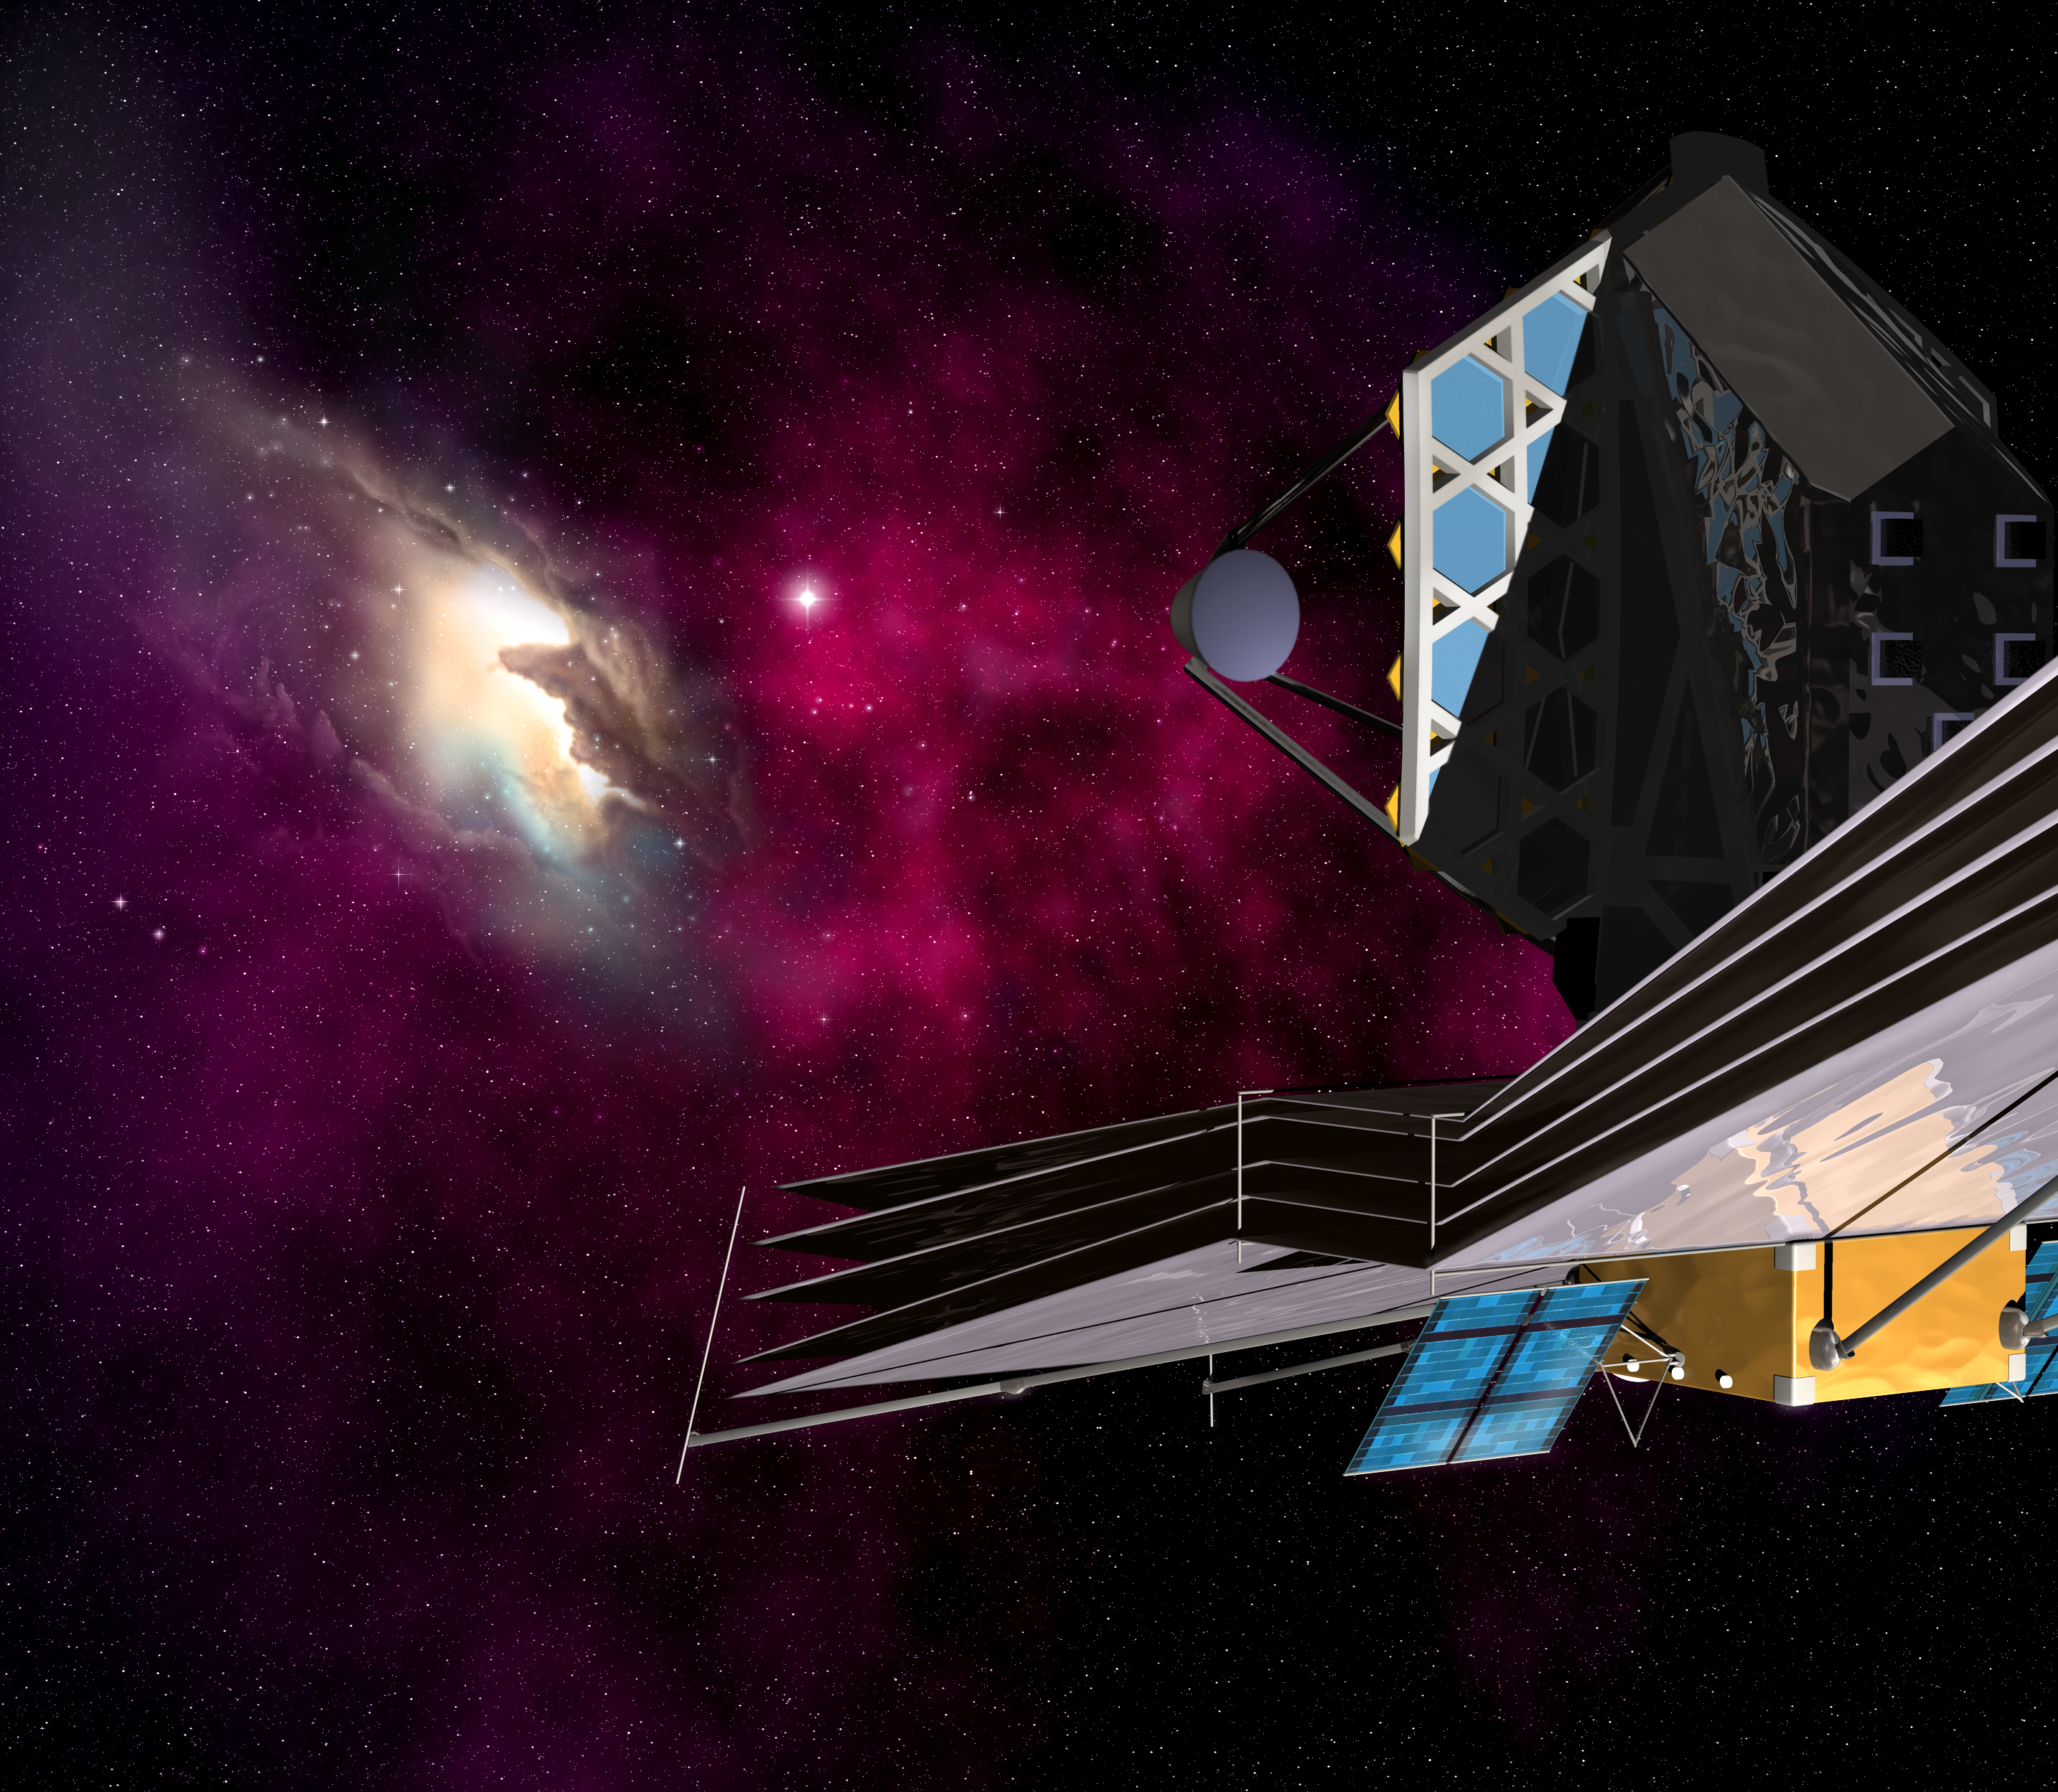

The James Webb Space Telescope (artist's impression)

The James Webb Space Telescope turning its attention to a nebula.

Credit: ESA